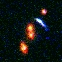

Hubble's Top Ten Gravitational Galaxies. A View of HST 18078+4600

HST 18078+4600 is a blue arc caused by the gravitational potential of a small group of 4 galaxies.

Credit: Kavan Ratnatunga (Carnegie Mellon Univ.) and NASA/ESA